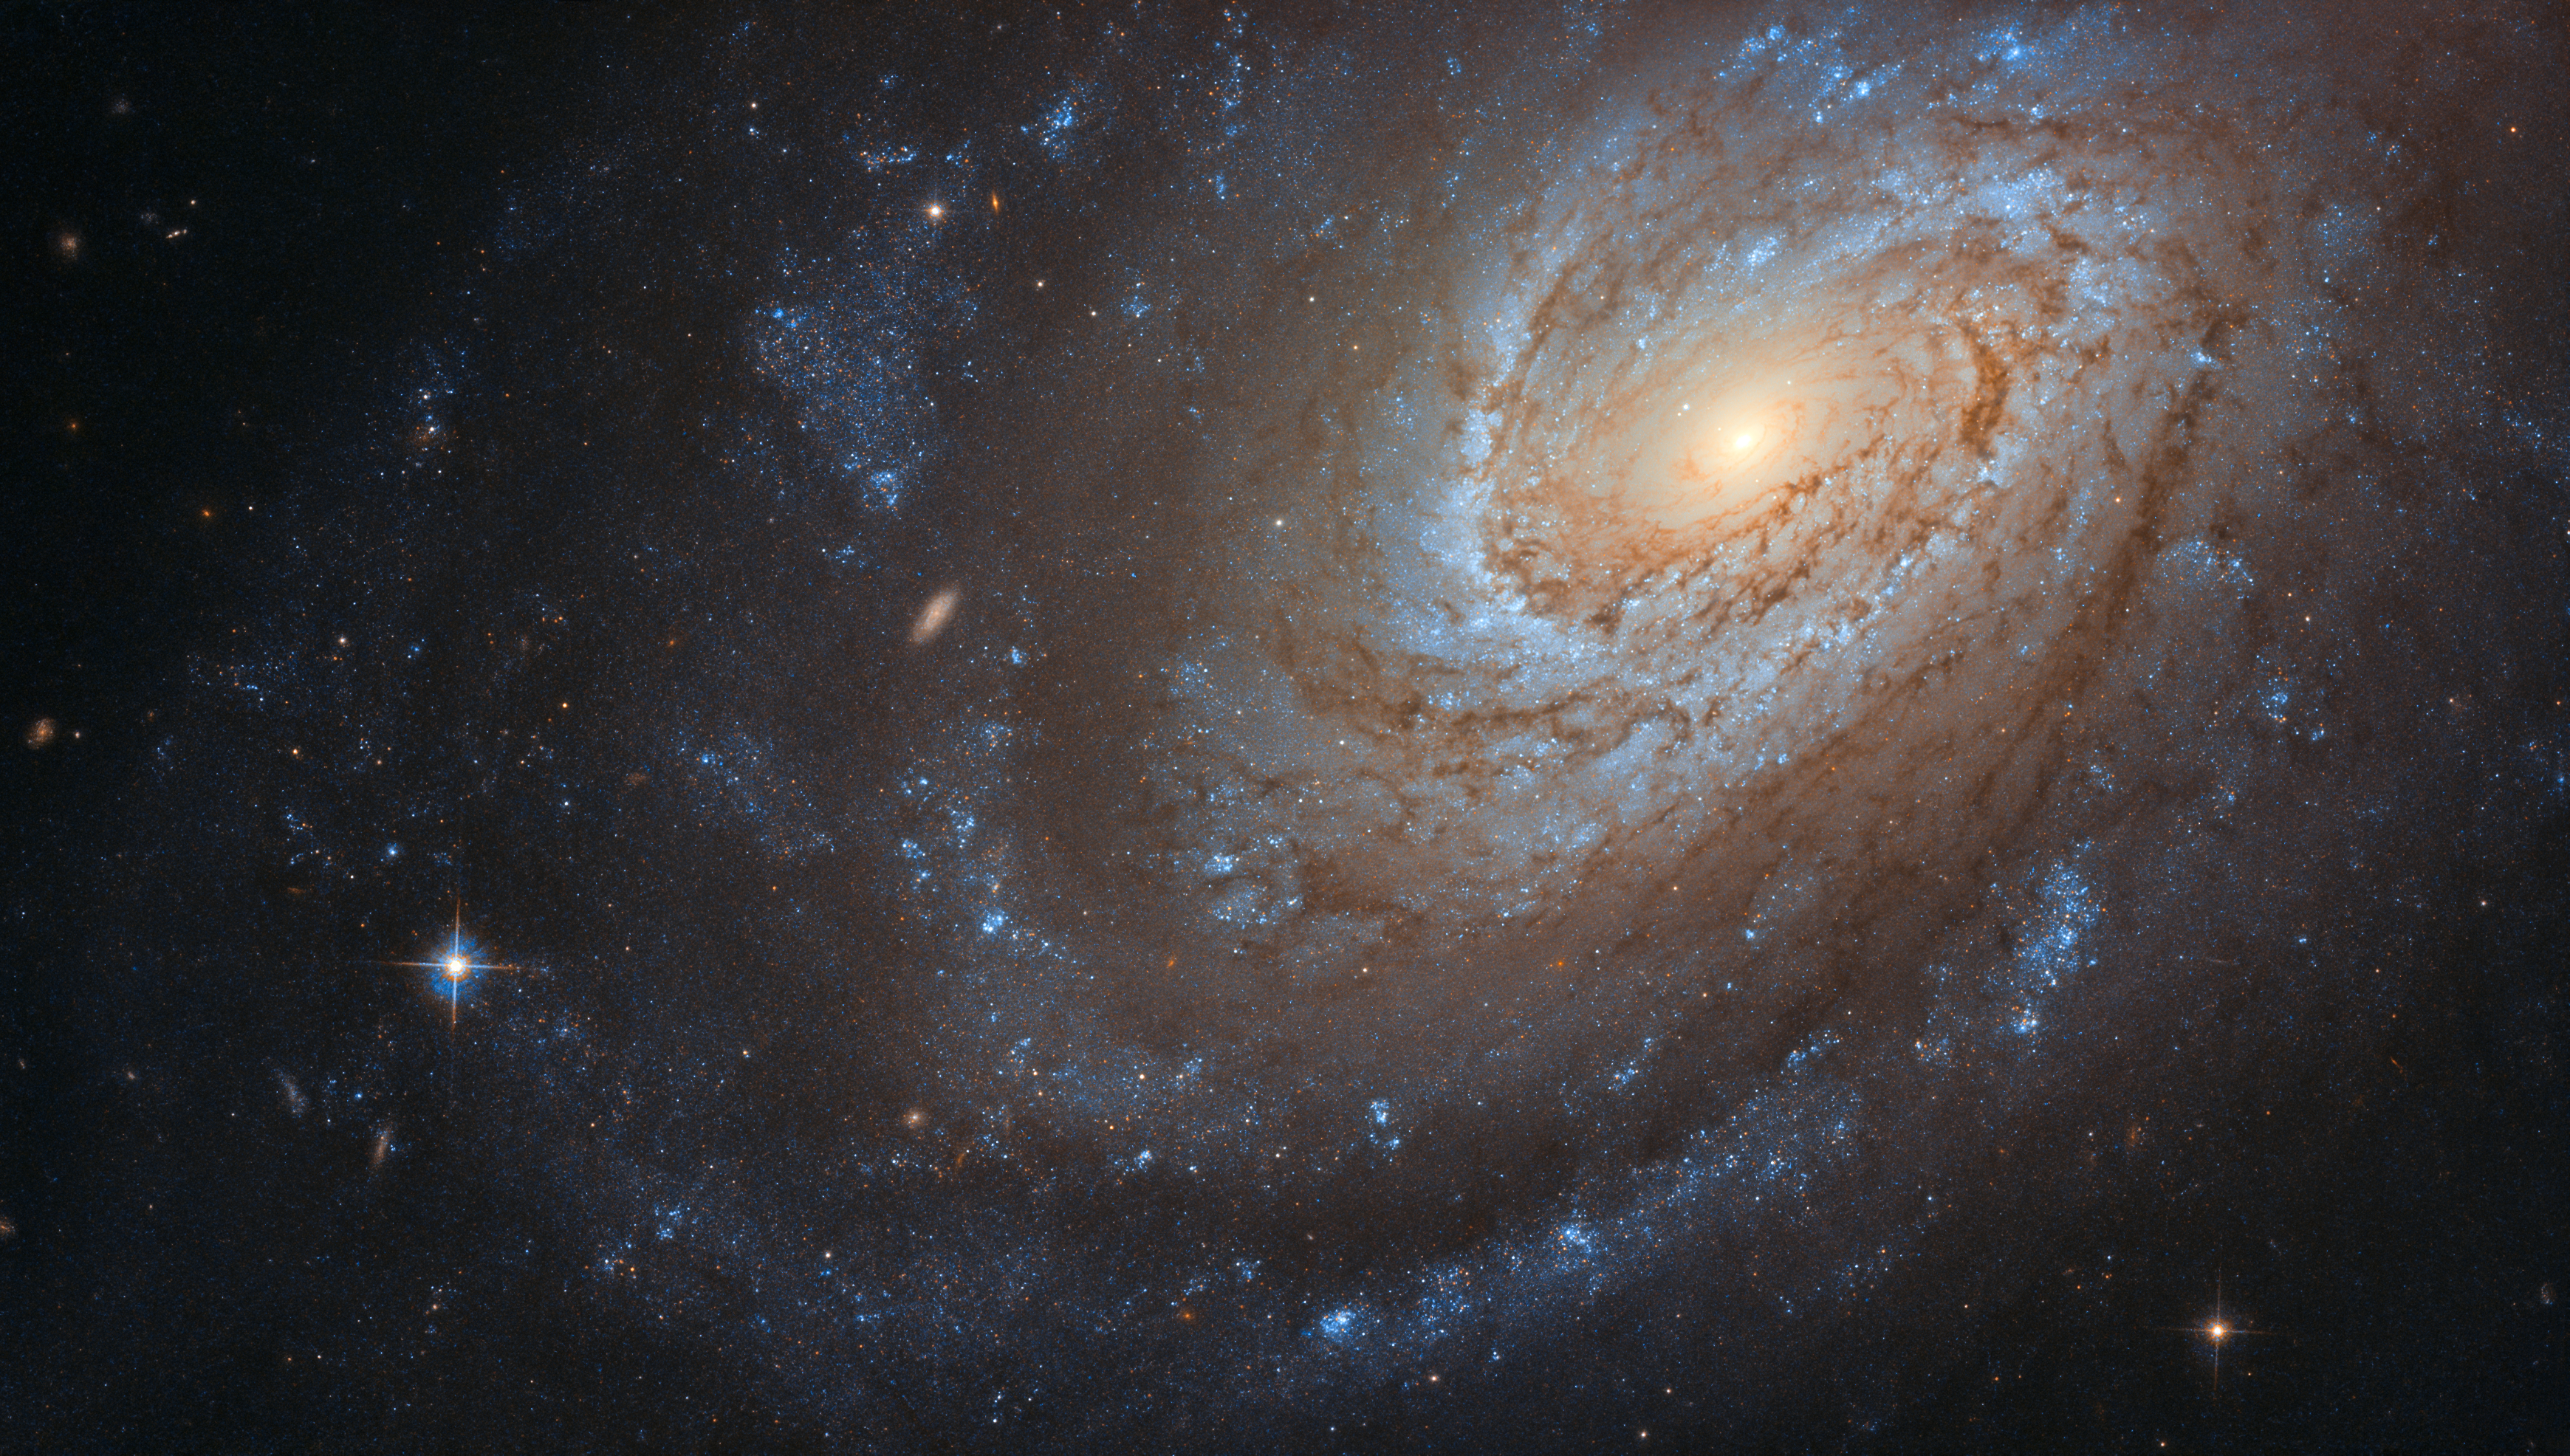

Feeding Time

This remarkable spiral galaxy, known as NGC 4651, may look serene and peaceful as it swirls in the vast, silent emptiness of space, but don’t be fooled — it keeps a violent secret. It is believed that this galaxy consumed another smaller galaxy to become the large and beautiful spiral that we observe today.

Although only a telescope like the NASA/ESA Hubble Space Telescope, which captured this image, could give us a picture this clear, NGC 4651 can also be observed with an amateur telescope — so if you have a telescope at home and a star-gazing eye, look out for this glittering carnivorous spiral.

Credit: ESA/Hubble & NASA, D. Leonard